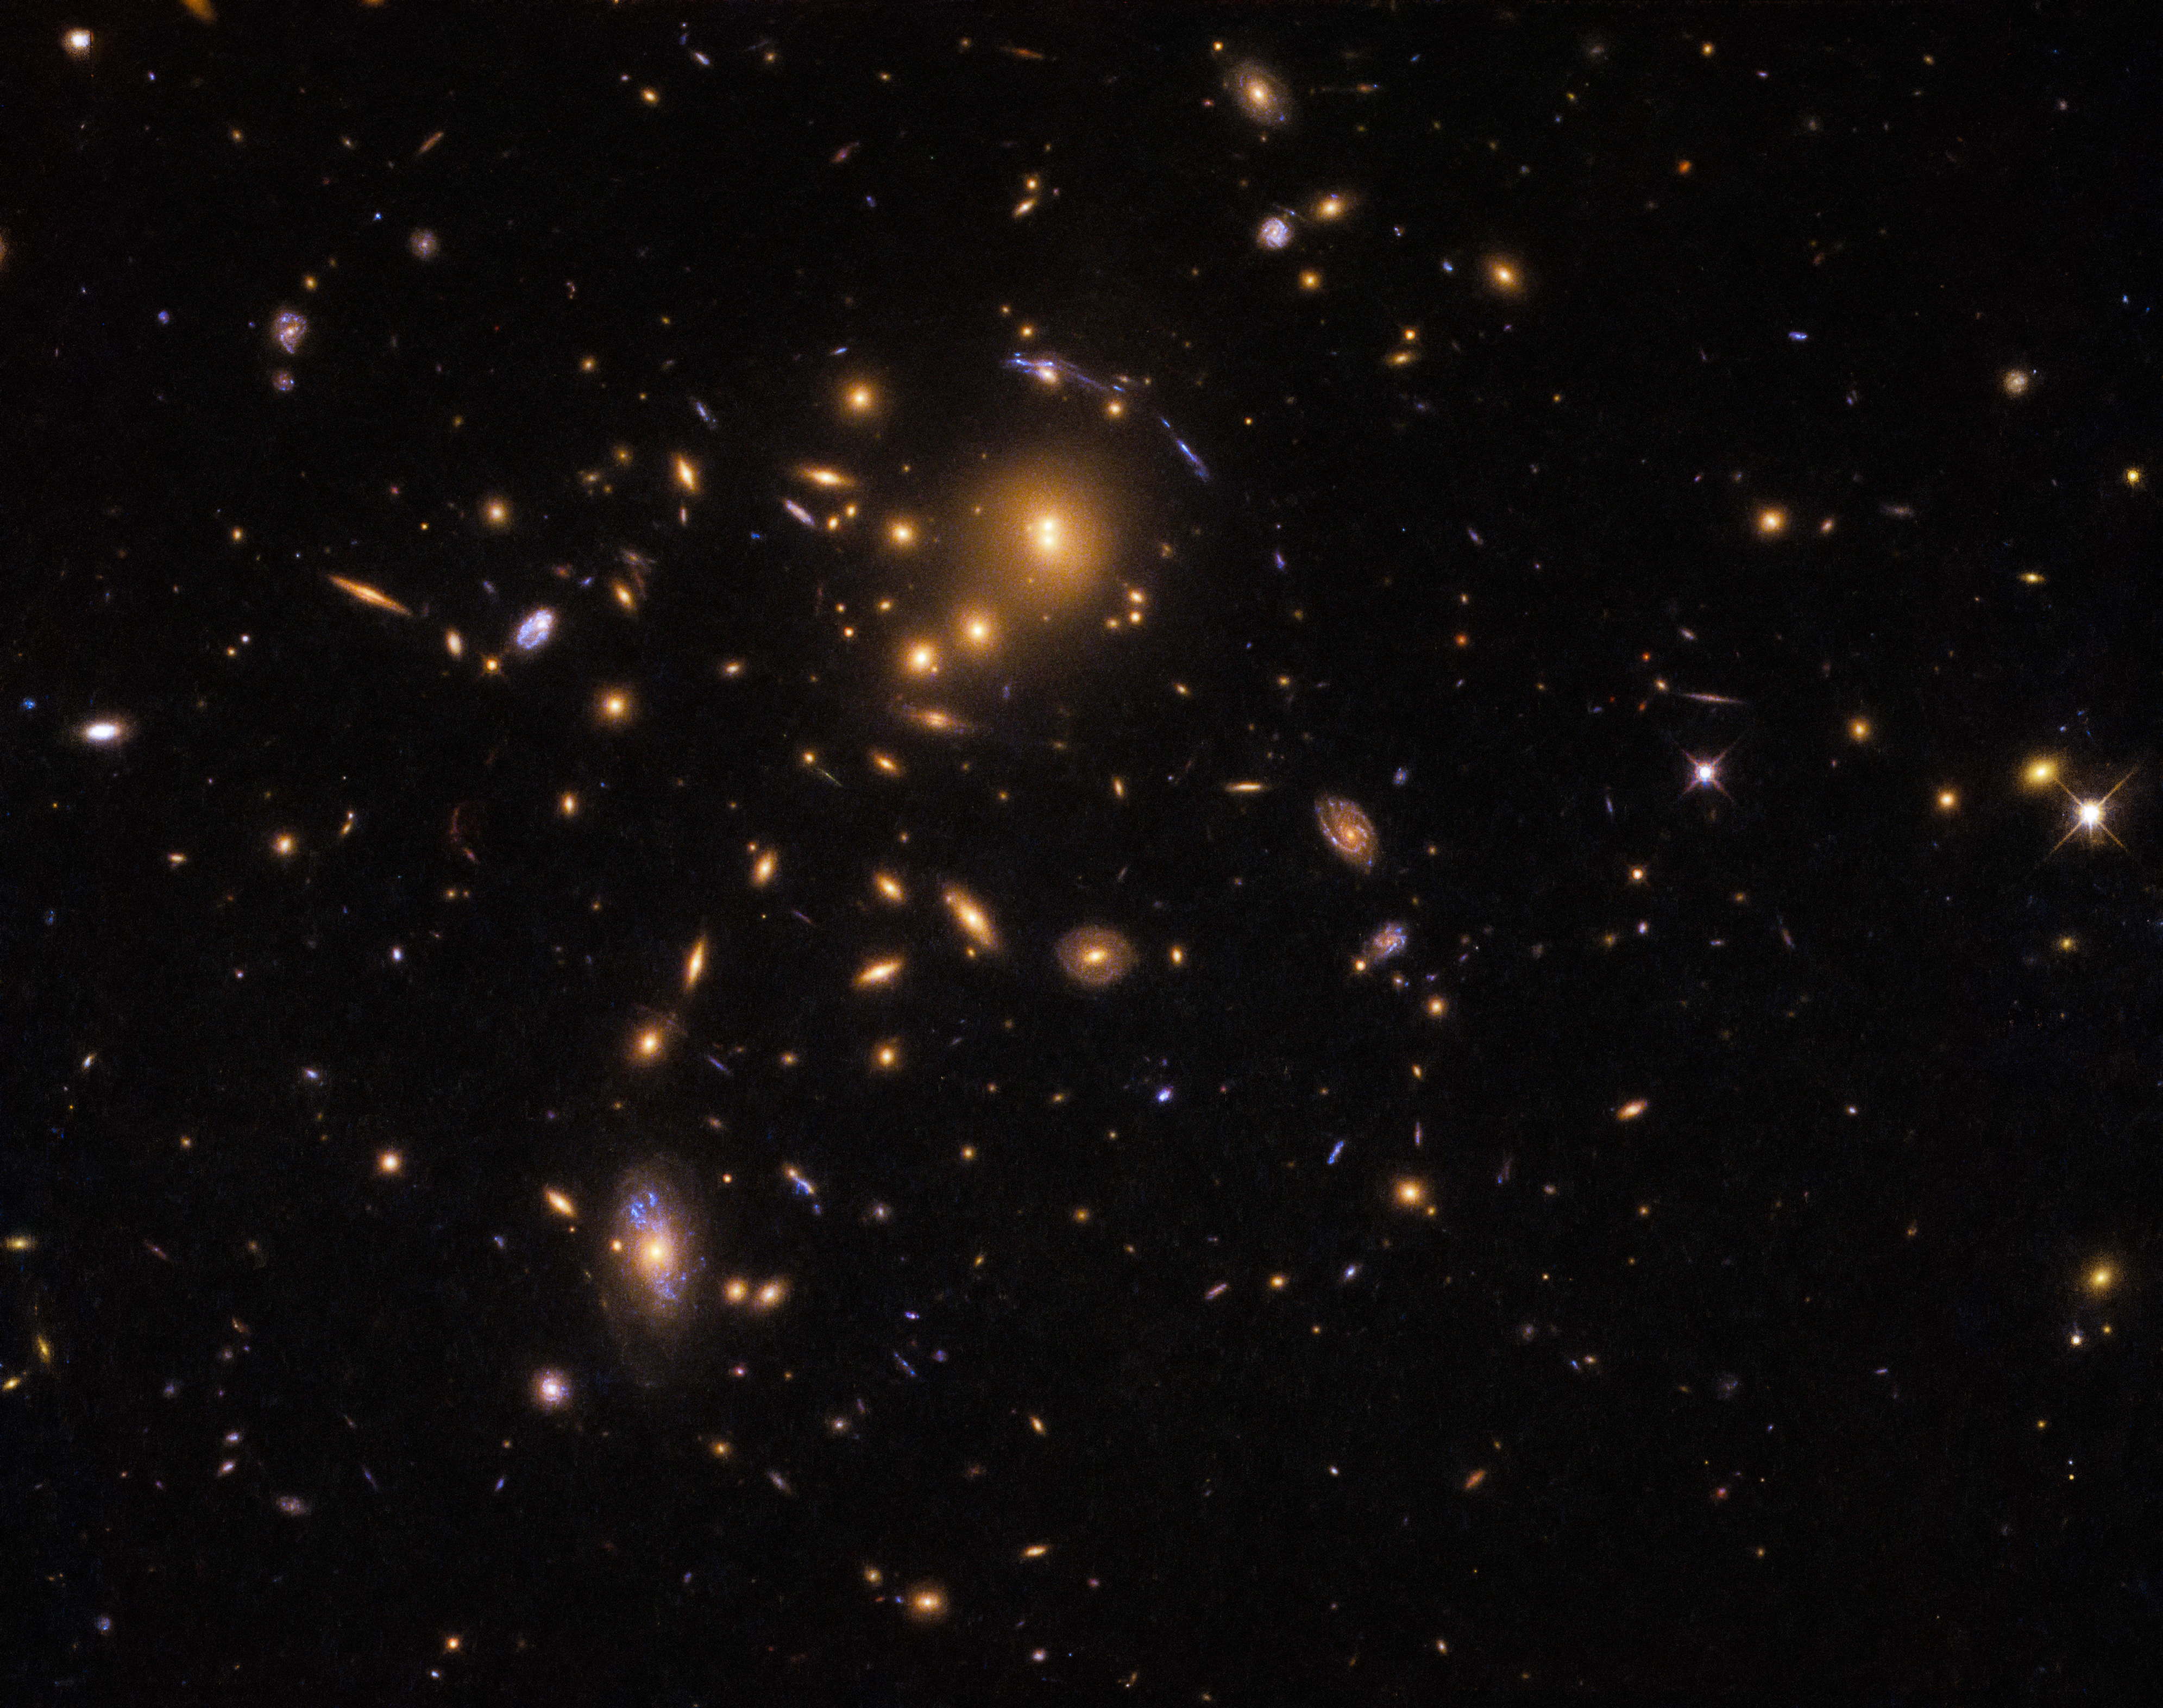

Helping Hubble

The NASA/ESA Hubble Space Telescope doesn’t usually get much assistance from its celestial subjects — but to take this image, the telescope opted for teamwork and made good use of a fascinating cosmic phenomenon known as gravitational lensing.

This effect works when the gravitational influence of a massive object, such as the galaxy cluster in the centre of this image, is so colossal that it warps the surrounding space, causing nearby light to travel along distorted paths. The massive object is effectively turned into a giant magnifying glass, bending and amplifying the light travelling from more distant galaxies lying behind it.

In this particular case, astronomers used the foreground galaxy cluster (named SDSS J0915+3826) to study star formation in galaxies lying so far away that their light has taken up to 11.5 billion years to reach our eyes. These galaxies formed at a very early stage in the lifetime of the Universe, giving astronomers a rare glimpse into the beginning of the cosmos. Despite their distance, the lensing effects of SDSS J0915+3826 allowed astronomers to work out the sizes, luminosities, star formation rates, and stellar populations of individual star-forming clumps within these galaxies — quite an achievement!

Credit: ESA/Hubble & NASA Acknowledgement: Judy Schmidt (geckzilla.com)